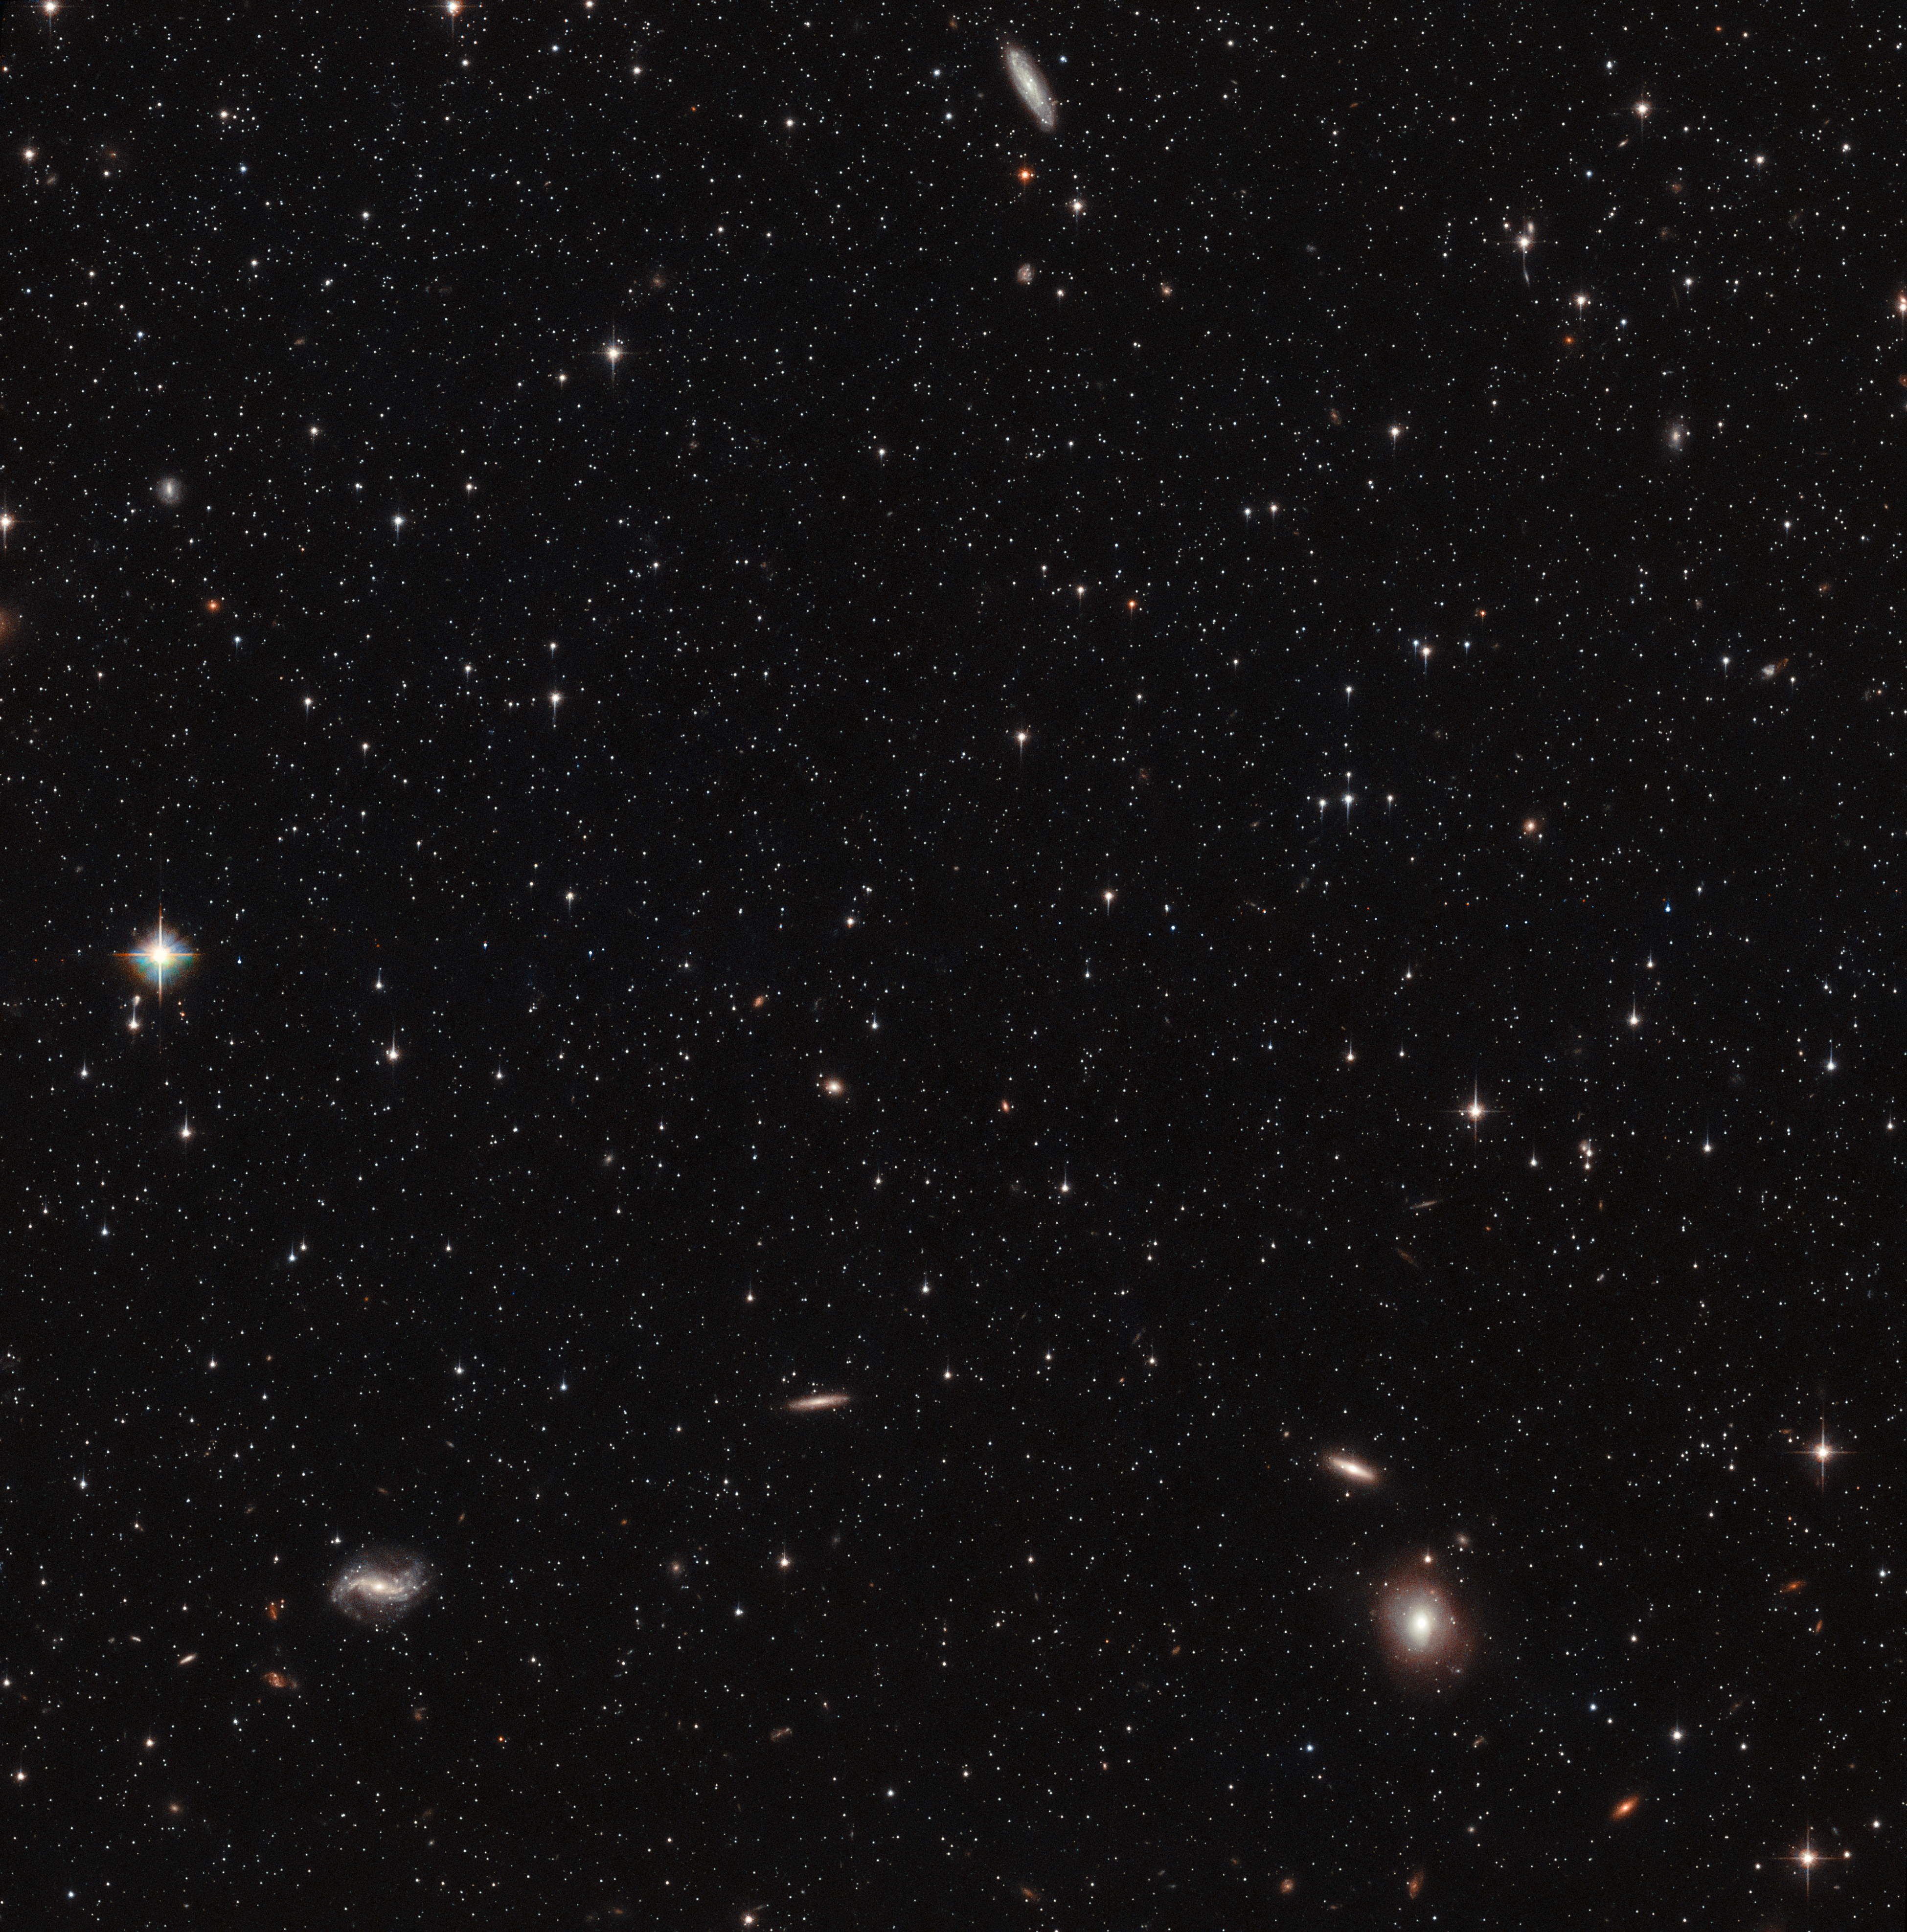

Hubble’s view of the Sculptor Dwarf Galaxy (pointing 1)

This image shows a small part of the Sculptor Dwarf Galaxy, a satellite galaxy of the Milky Way, situated only about 300 000 light-years away from Earth. This is one of two different pointings of the telescope that were used in a study combining data from the NASA/ESA Hubble Space Telescope and ESA’s Gaia satellite to measure the 3D motion of stars in this galaxy.

Credit: ESA/Hubble & NASA